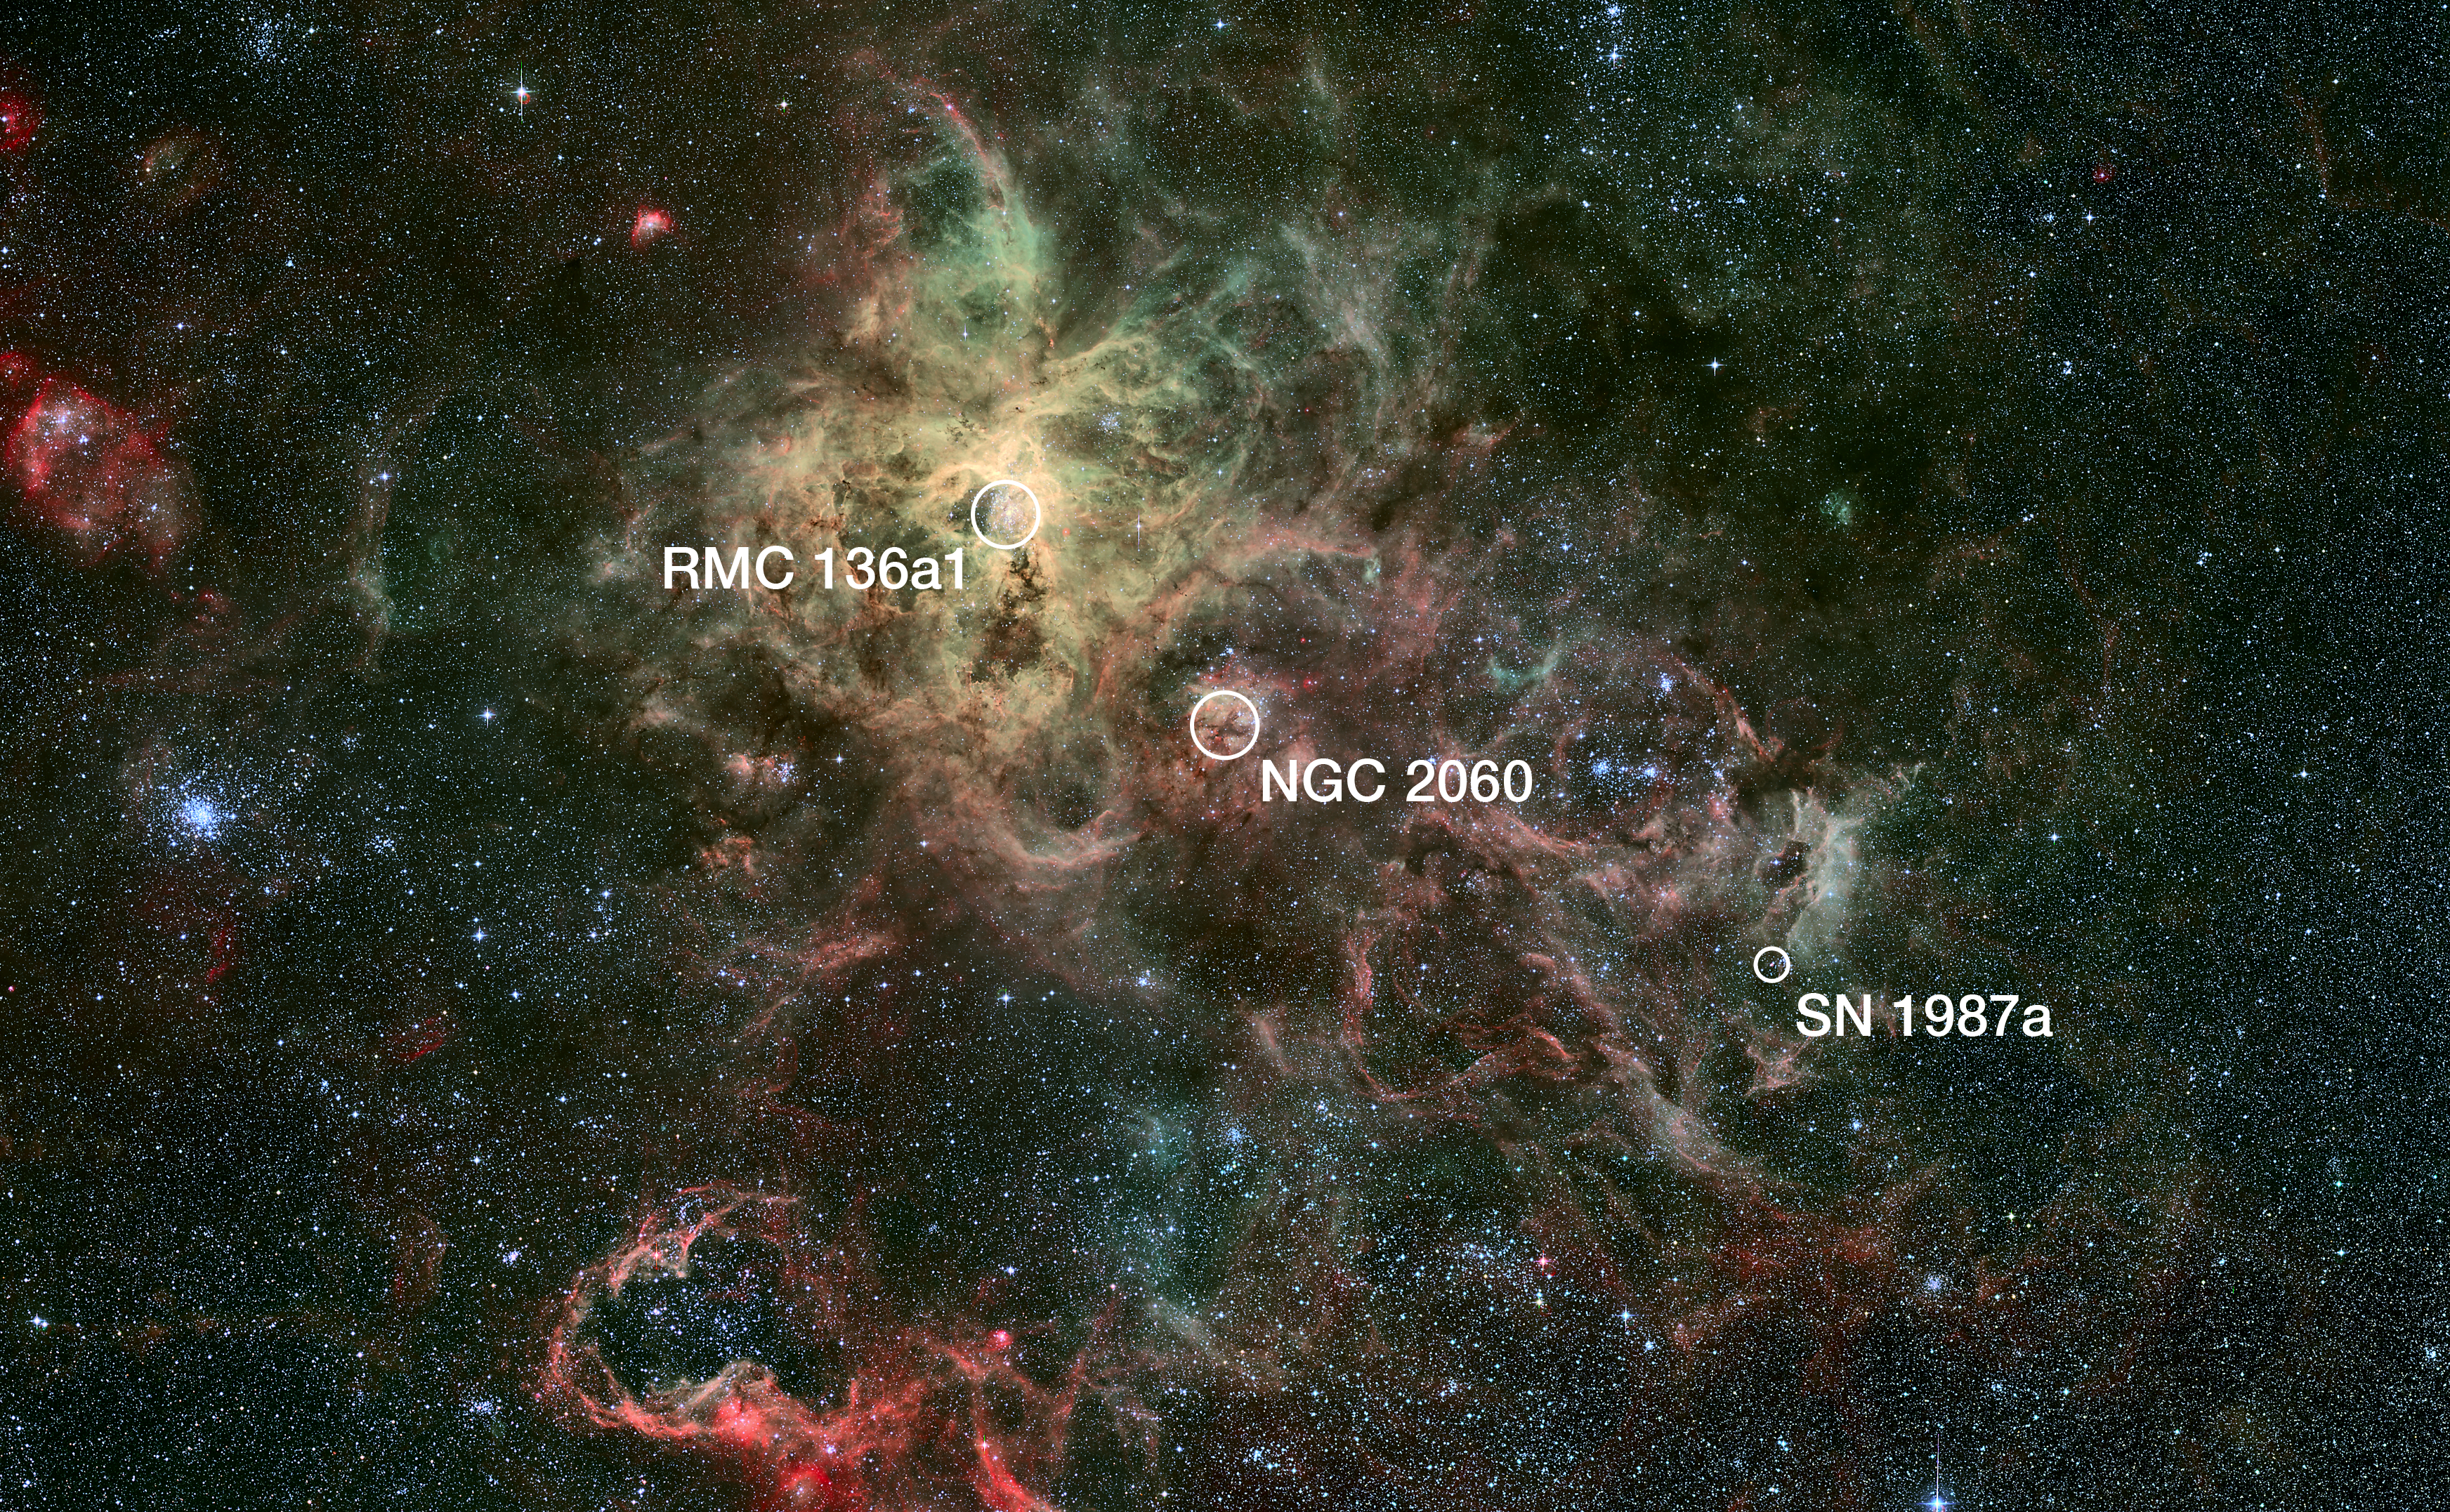

Annotated wide-field view of the Tarantula Nebula (ground-based image)

This wide-field view of the Tarantula Nebula was taken with the Wide Field Imager (WFI) on the MPG/ESO 2.2-metre telescope at the European Southern Observatory’s site at La Silla, Chile. This view shows the location of the heaviest star ever discovered (RMC 136a1, within the super star cluster RMC 136), the closest supernova to Earth to have been observed since the invention of the telescope (SN 1987a), plus the remnants of another supernova (NGC 2060). The Tarantula Nebula is the brightest nebula of its type in the local Universe.

Credit: NASA, ESA, ESO